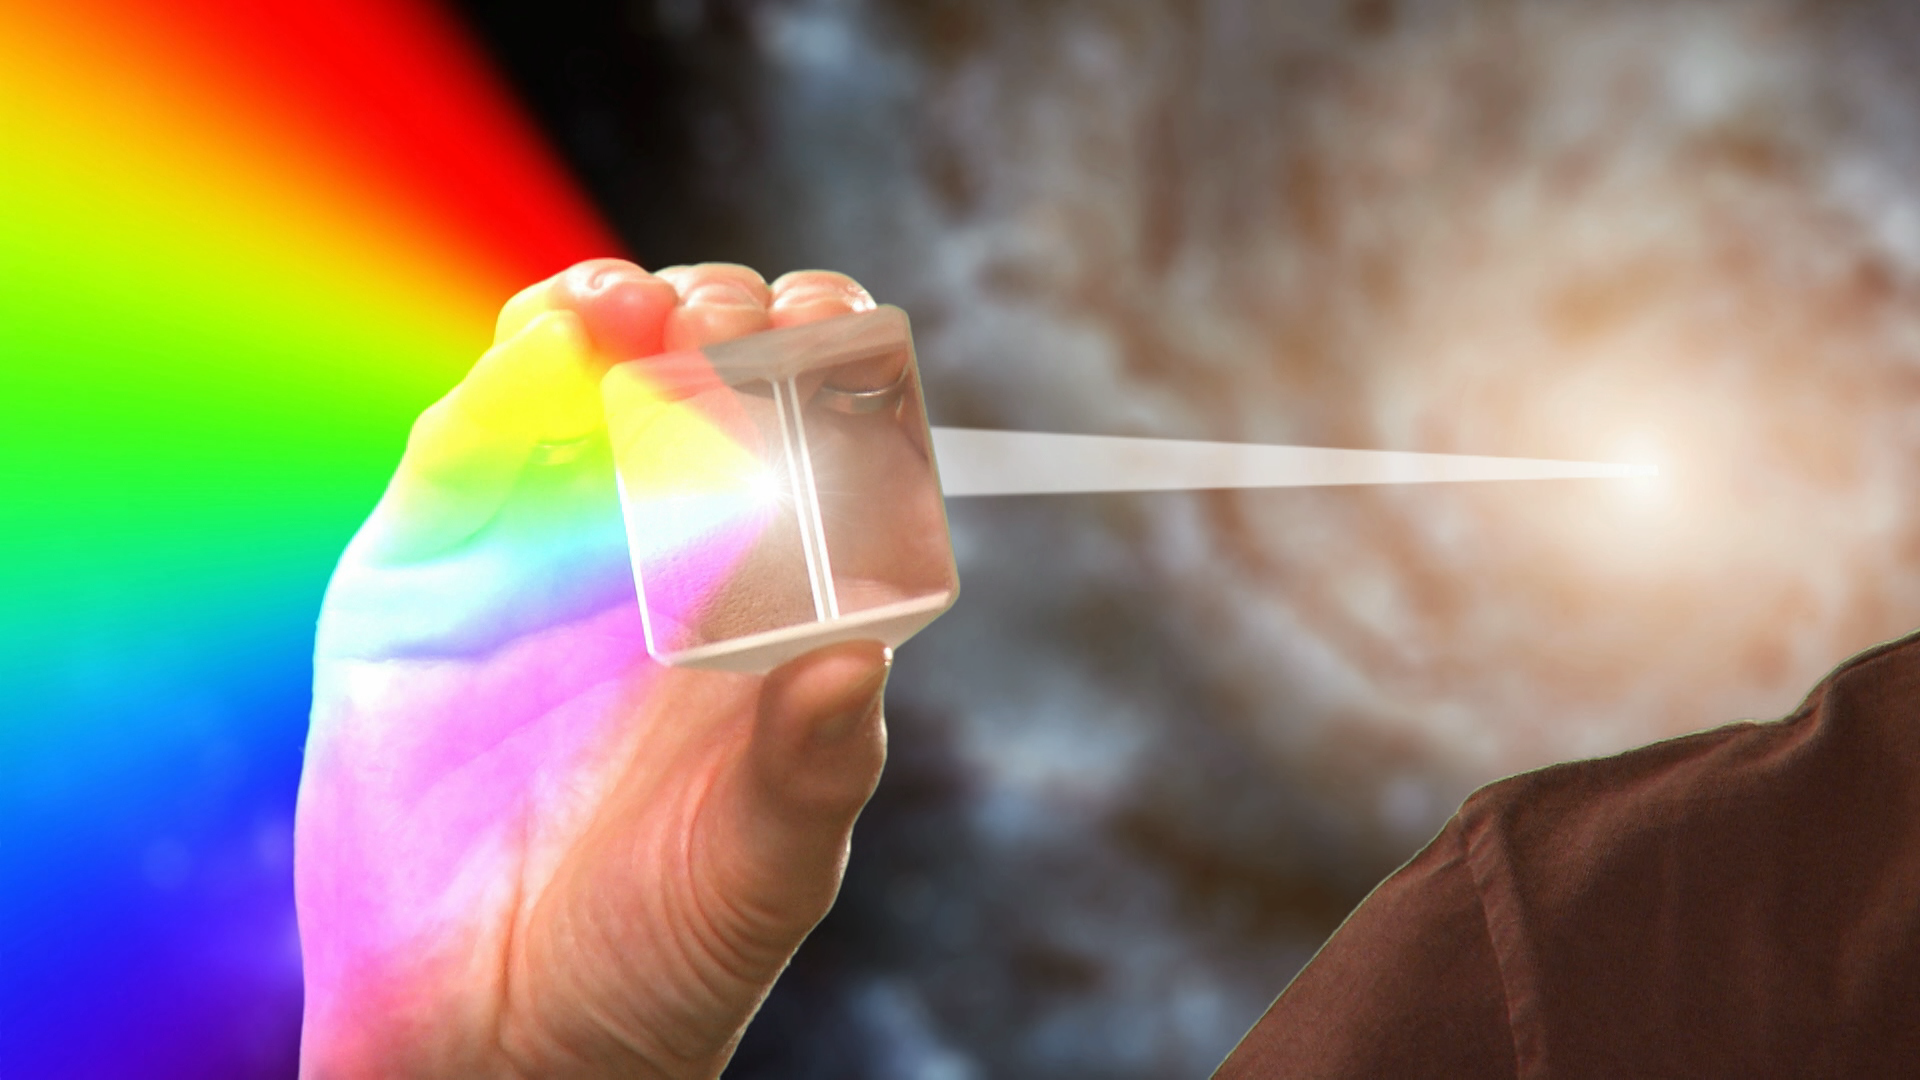

Screenshot of Hubblecast 133

Screenshot of Hubblecast 133: Spectroscopy with Hubble.

Credit: ESA/Hubble